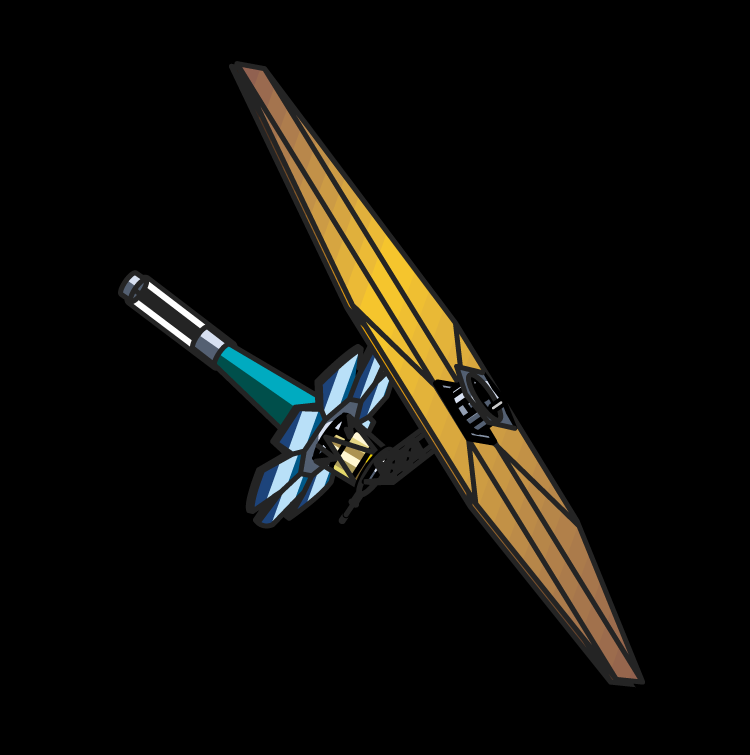

Goddard Space Flight Center design

The Goddard Space Flight Center-led team developed this lightweight design for JWST. It incorporates many of the features found in the other designs: a deployable, 26-foot-wide (nearly 8 meters) primary mirror, a large deployable sunshade to shield the optics, and an orbit 930,000 miles (1.5 million kilometers) from Earth at the L2 Lagrangian point, a balancing point between the gravitational tug of the Earth and the Sun. The spacecraft has a deployable sunshade, an umbrella that will keep the telescope chilled -370 degrees Fahrenheit to -298 degrees Fahrenheit (about -183 degrees Celsius), which allows it to see the faint infrared glow of distant objects. With this design, the telescope can view about 40 percent of the sky at any time.

Credit: Goddard Space Flight Center